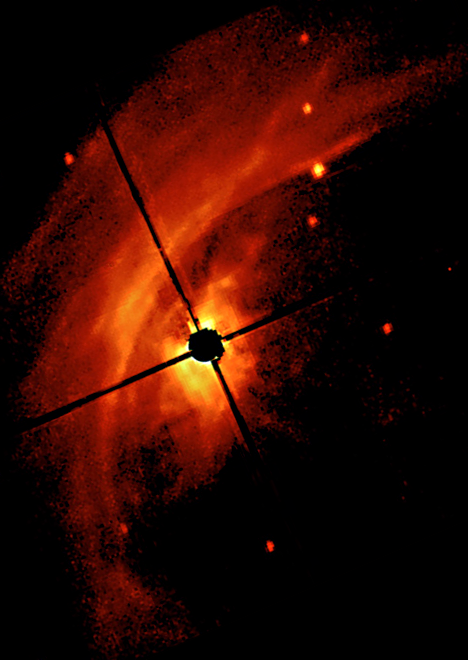

AB Aurigae disk (Ground-Based View)

The image on the left represents the best ground-based coronographic observation of AB Aurigae. Paul Kalas of the Space Telescope Science Institute took the image with the University of Hawaii's 2.2-meter telescope. The telescope's coronograph eclipsed a 33.5-billion-mile (53.6-billion-kilometer) area centered on the star. This area is nine times larger than our solar system. The picture shows that the star resides in a region of dust clouds - the semicircular-shaped material to the left of the star.

Credit: P. Kalas ( Space Telescope Science Institute)